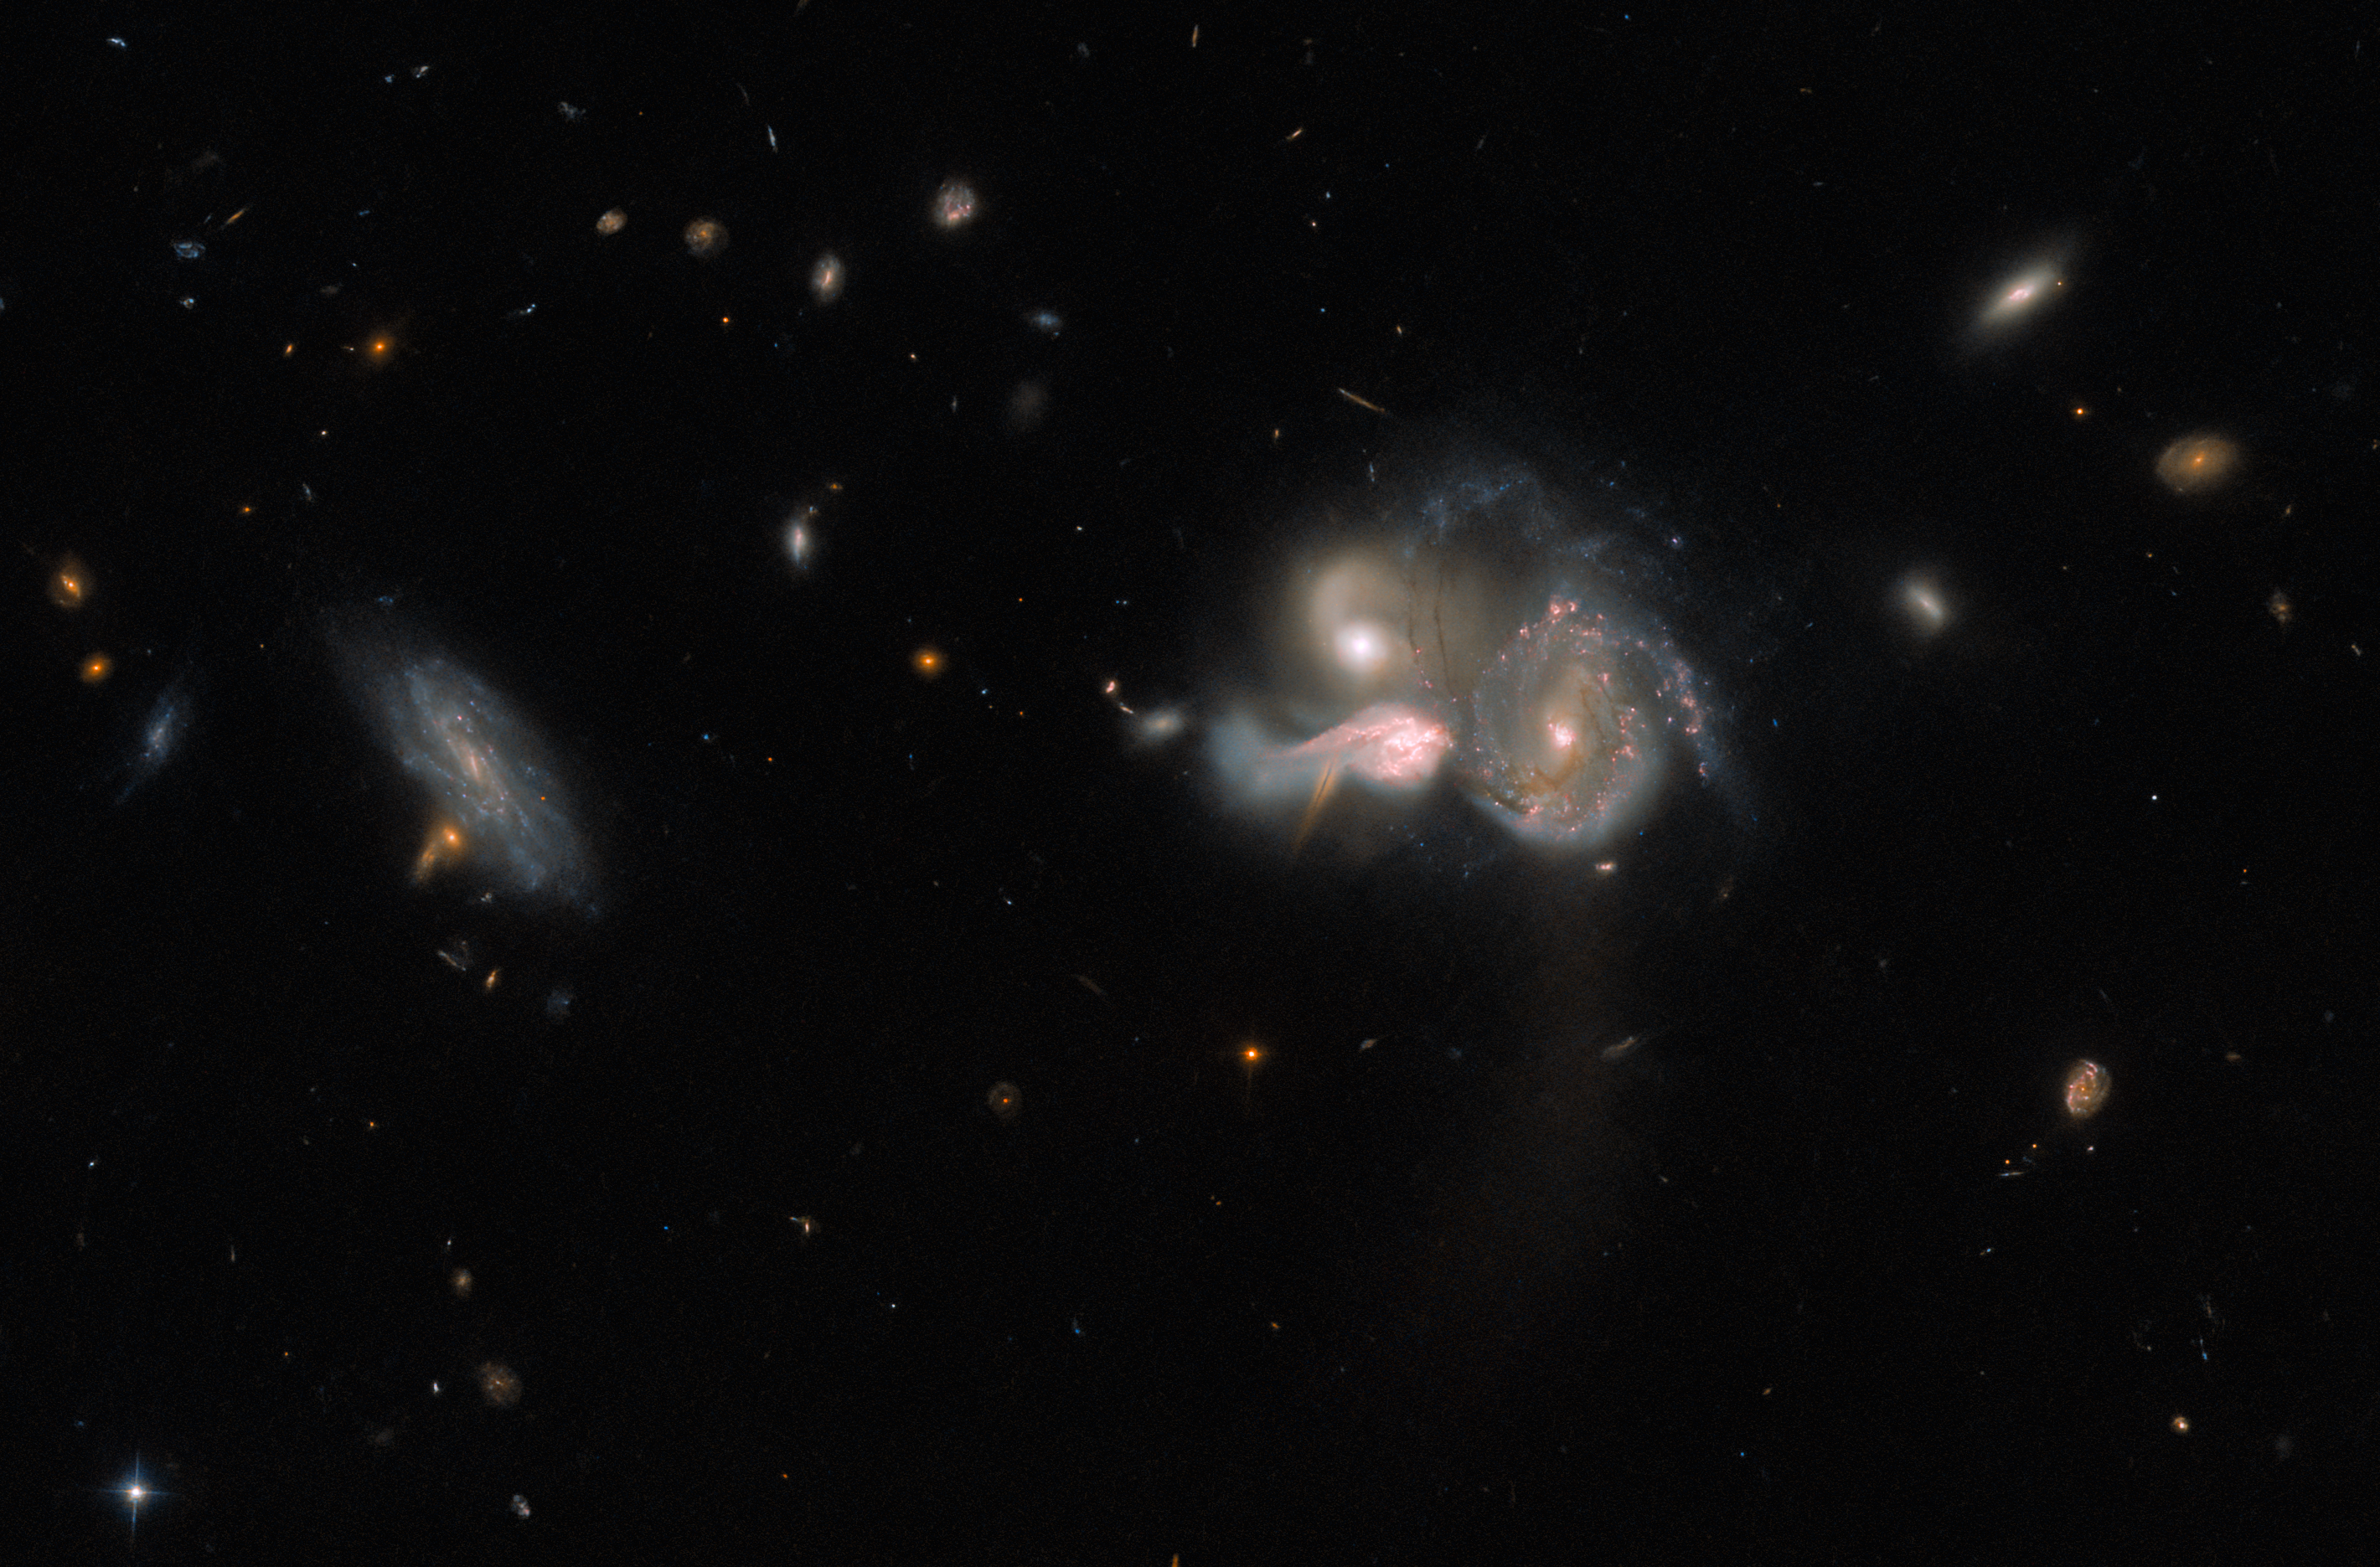

Galactic Crash Course

A spectacular trio of merging galaxies in the constellation Boötes takes centre stage in this image from the NASA/ESA Hubble Space Telescope. These three galaxies are set on a collision course and will eventually merge into a single larger galaxy, distorting one another’s spiral structure through mutual gravitational interaction in the process. An unrelated foreground galaxy appears to float serenely alongside the collision, and the smudged shapes of much more distant galaxies are visible in the background.

This colliding trio — known to astronomers as SDSSCGB 10189 — is a relatively rare combination of three large star-forming galaxies lying within only 50 000 light-years of one another. While that might sound like a safe distance, for galaxies this makes them extremely close neighbours! Our own galactic neighbours are much further away; Andromeda, the nearest large galaxy to the Milky Way, is more than 2.5 million light-years away from Earth.

This observation was designed to help astronomers understand the origin of the largest, most massive galaxies in the universe. These galactic behemoths are called Brightest Cluster Galaxies (BCGs) and — as the name suggests — are defined as the brightest galaxies in any given galaxy cluster. Astronomers suspect that BCGs form through the merger of large, gas-rich galaxies like the ones in this image. They turned to Hubble’s Wide Field Camera 3 and Advanced Camera for Surveys to investigate this galactic trio in painstaking detail, hoping to shed light on the formation of the Universe’s most massive galaxies.

Credit: ESA/Hubble & NASA, M. Sun